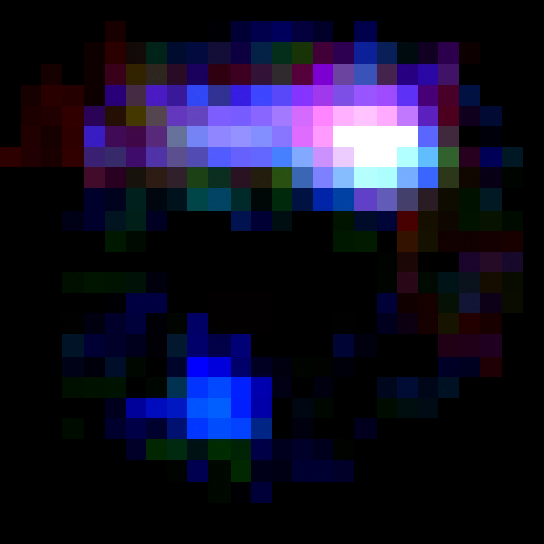

IRC 0218 lensing feature without foreground cluster

This NASA/ESA Hubble Space Telescope image shows a region containing the most distant cosmic lens yet found, a massive elliptical galaxy whose powerful gravity is magnifying the light from a faraway galaxy behind it.

In this image astronomers have subtracted the image of the giant red elliptical to show a more distant spiral galaxy. The glow of young stars makes the galaxy appear blue. The white area at upper right is probably a region of star formation.

Credit: NASA, ESA, K.-V. Tran (Texas A&M University), and K. Wong (Academia Sinica Institute of Astronomy & Astrophysics)